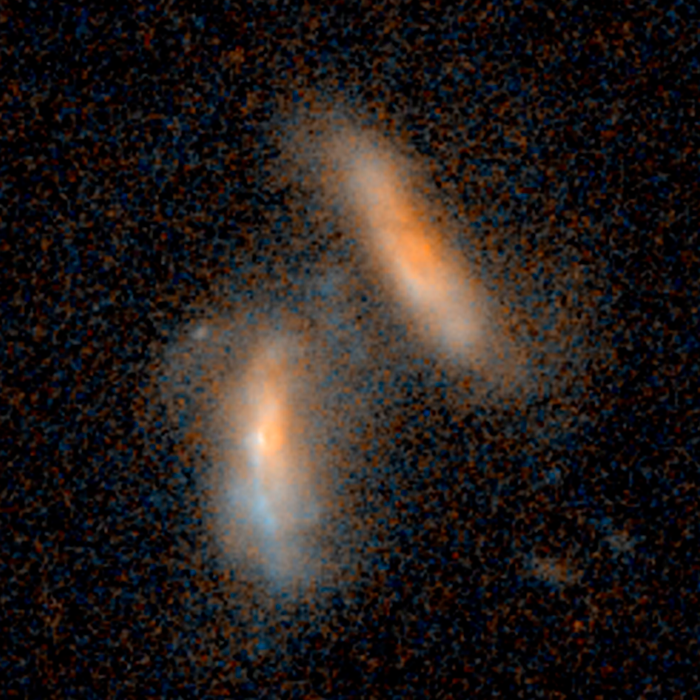

Merging galaxies — 2.4 billion light-years from Earth

Merging galaxies — 2.4 billion light-years from Earth.

Credit: NASA, ESA, and J. Lotz (STScI)